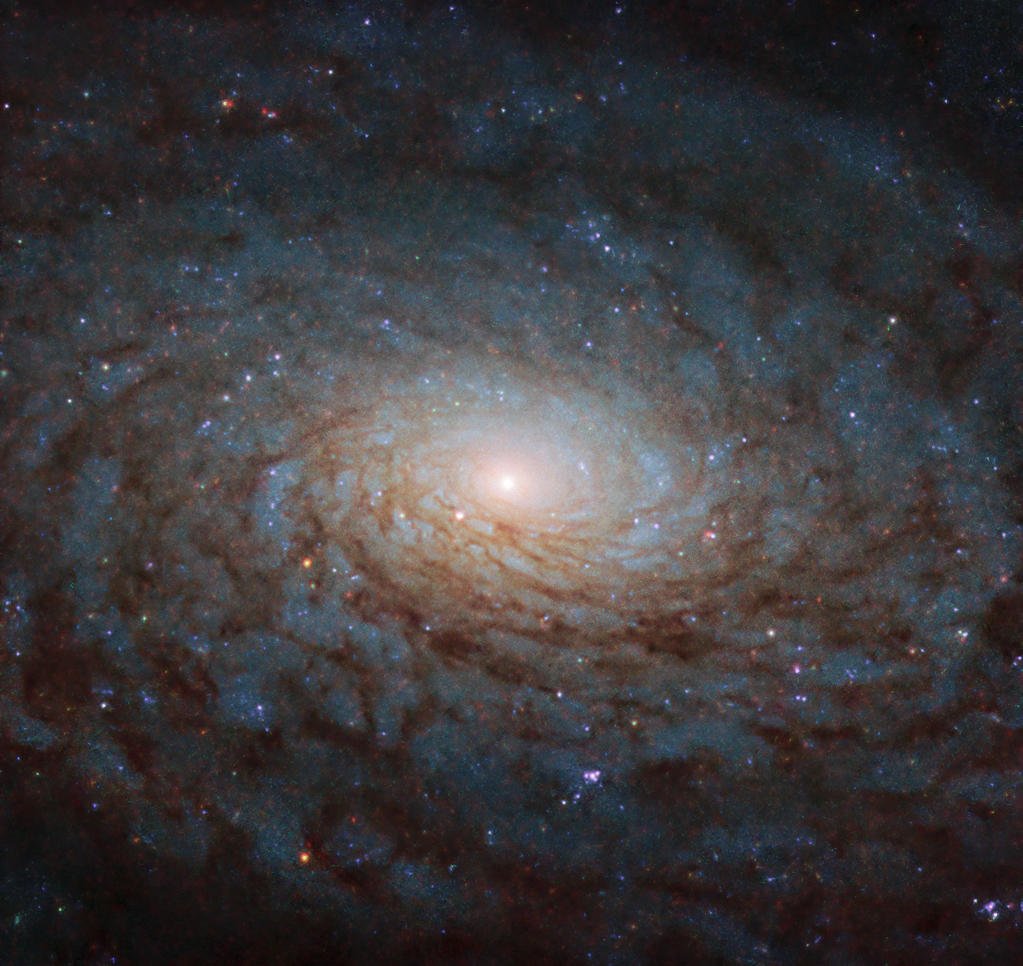

A Galactic Portal

The galaxy NGC 4380 looks like a special effect straight out of a science fiction or fantasy film in this Hubble Picture of the Week, swirling like a gaping portal to another dimension.

In the grand scheme of things, though, the galaxy is actually quite ordinary. Spiral galaxies like NGC 4380 are one of the most common types of galaxy in the Universe. These colossal collections of stars, often numbering in the hundreds of billions, are shaped like a flat disc, sometimes with a rounded bulge in the centre. Graceful spiral arms outlined by dark lanes of dust wind around the bulging core, which glows brightly and has the highest concentration of stars in the galaxy.

Credit: ESA/Hubble & NASA, P. Erwin